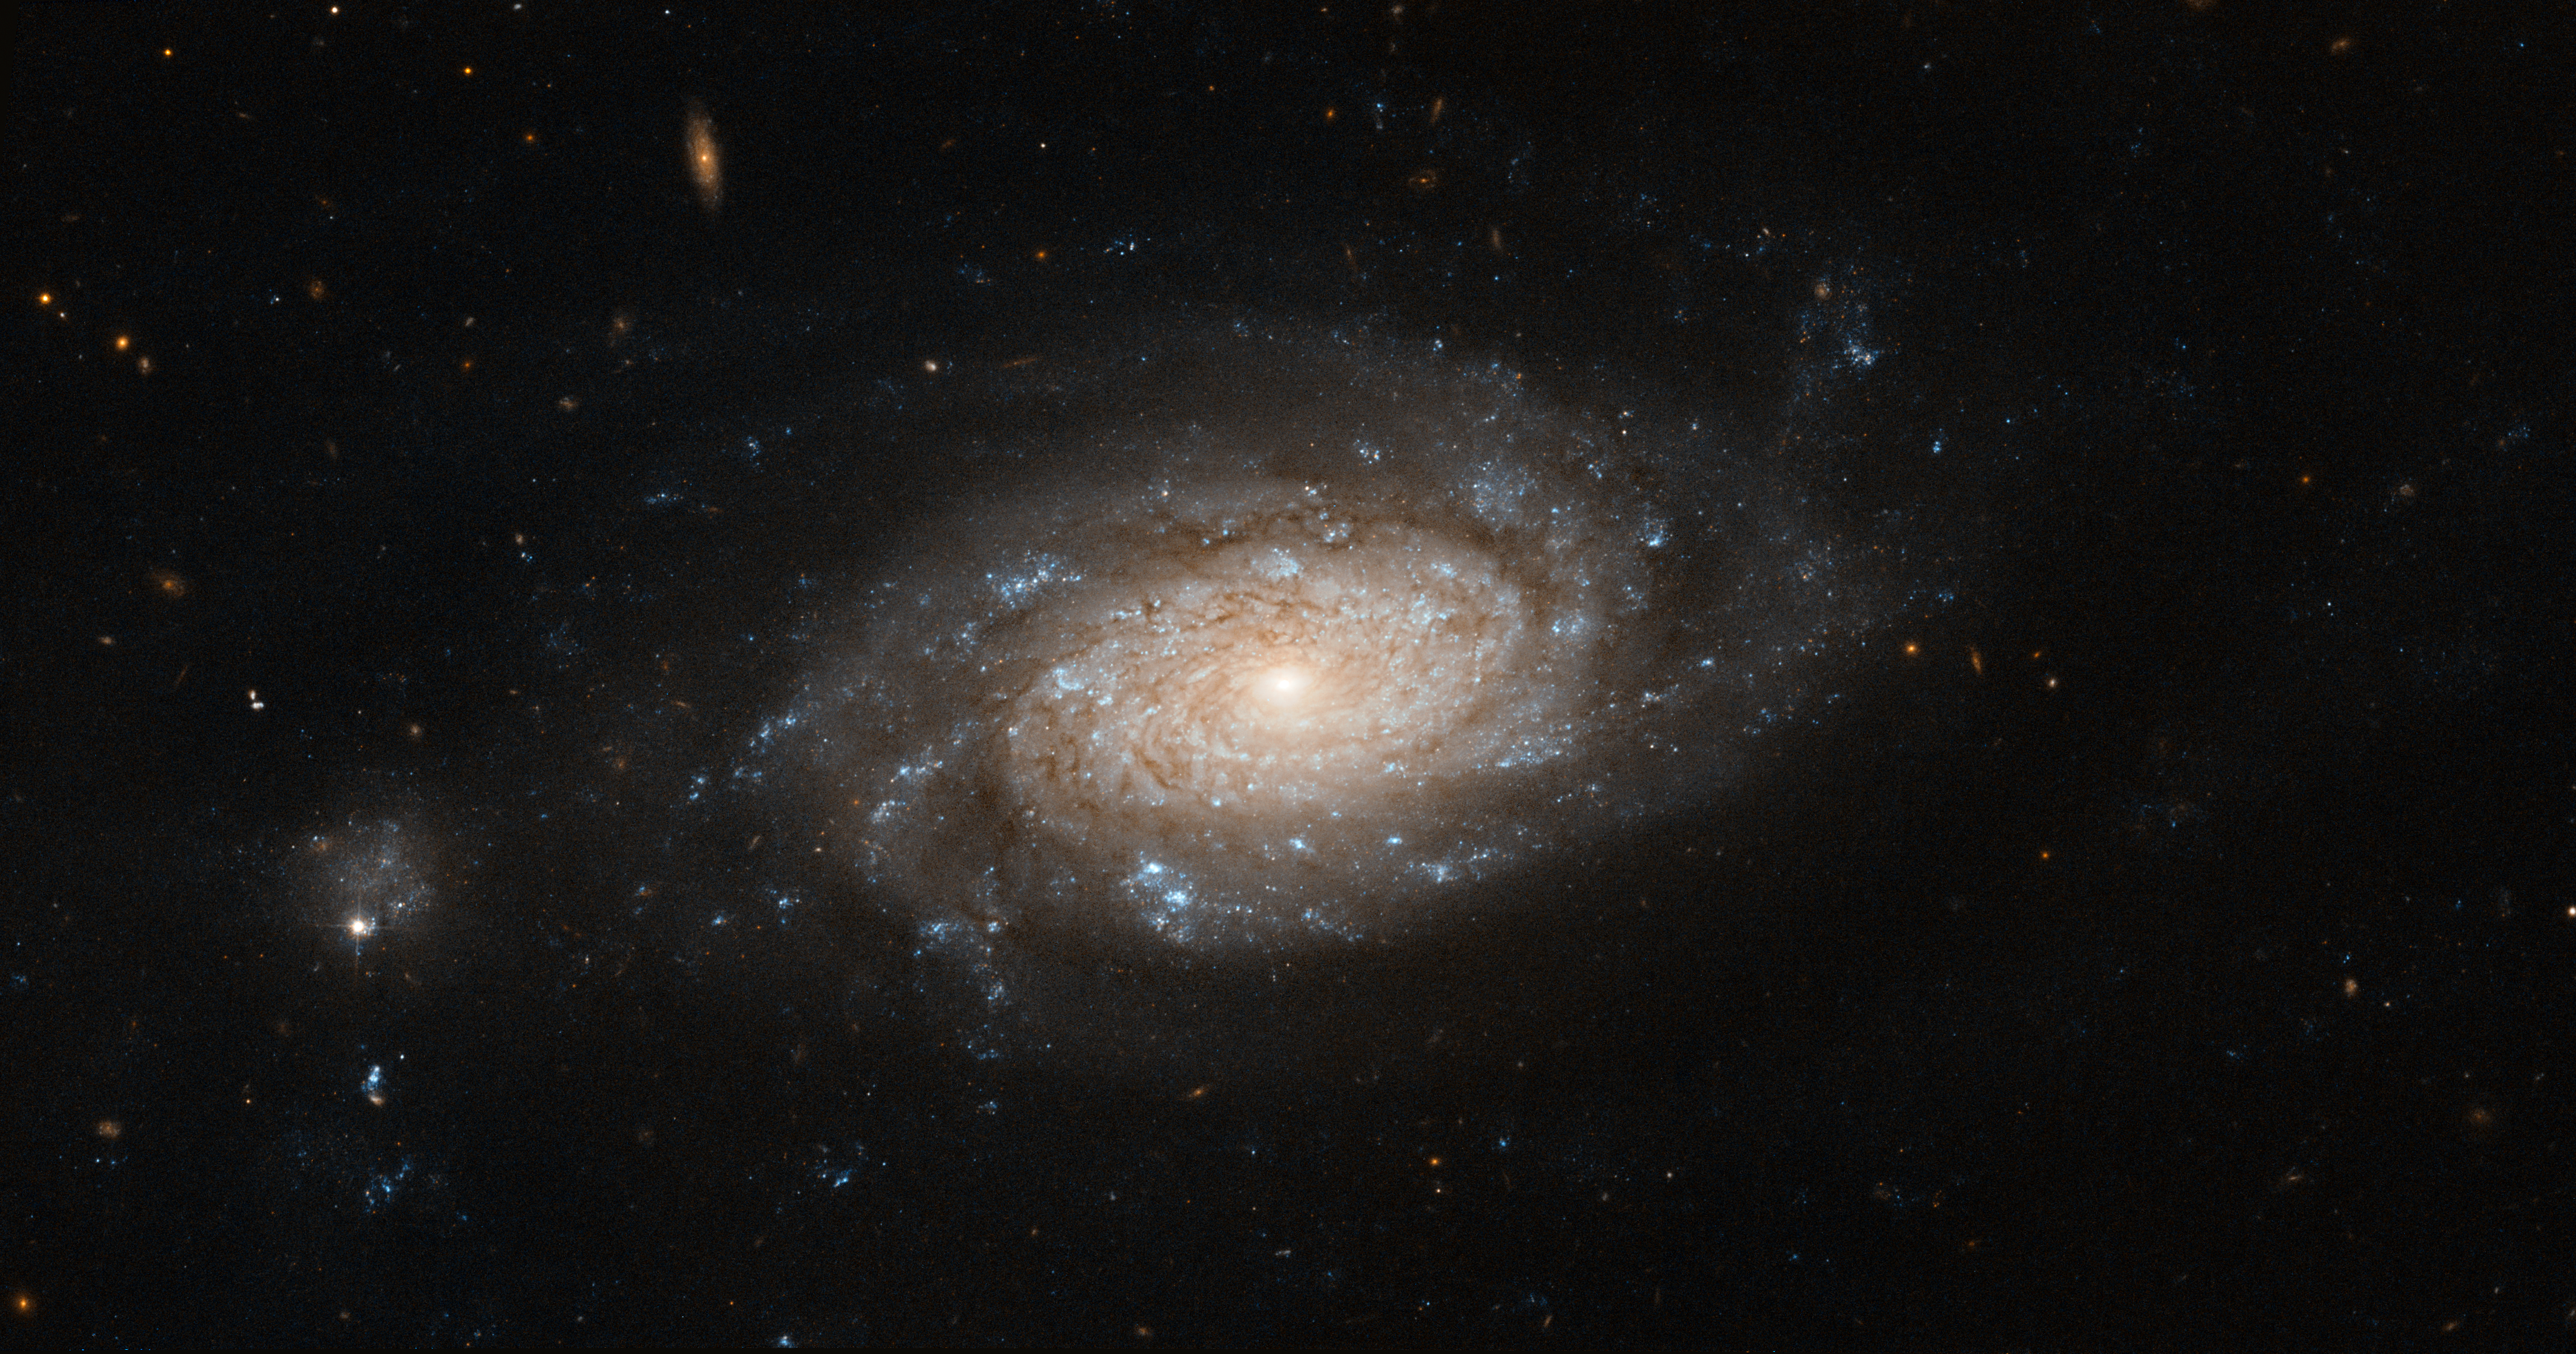

Hubble spots a busy barred spiral

This classic shot of a galaxy in the constellation of Ursa Major was taken by the NASA/ESA Hubble Space Telescope. NGC 3259 is a bright barred spiral galaxy located approximately 110 million light-years from Earth.

Being a fully-formed active galaxy, its bright central bulge hosts a supermassive black hole, whose huge appetite for matter explains the high luminosity of the galaxy’s core: as it devours its surroundings, the black hole emits intense radiation across the whole electromagnetic spectrum, including in visible light.

The beautiful spiral arms of the galaxy are not left out either as they contain dark lanes of dust and gas, ideal spawning grounds for stars. These bright, young, hot stars appear in rich clusters in the galaxy’s arms and are what gives the galaxy its blueish hue.

Interestingly, the galaxy has a small companion (visible to the left of the image), a much smaller galaxy that may be orbiting NGC 3259. In the background, numerous distant galaxies can be seen, easily identifiable by their elliptical shapes. They are visible here mainly in infrared light, which is shown in red in this image.

Credit: ESA/Hubble & NASA